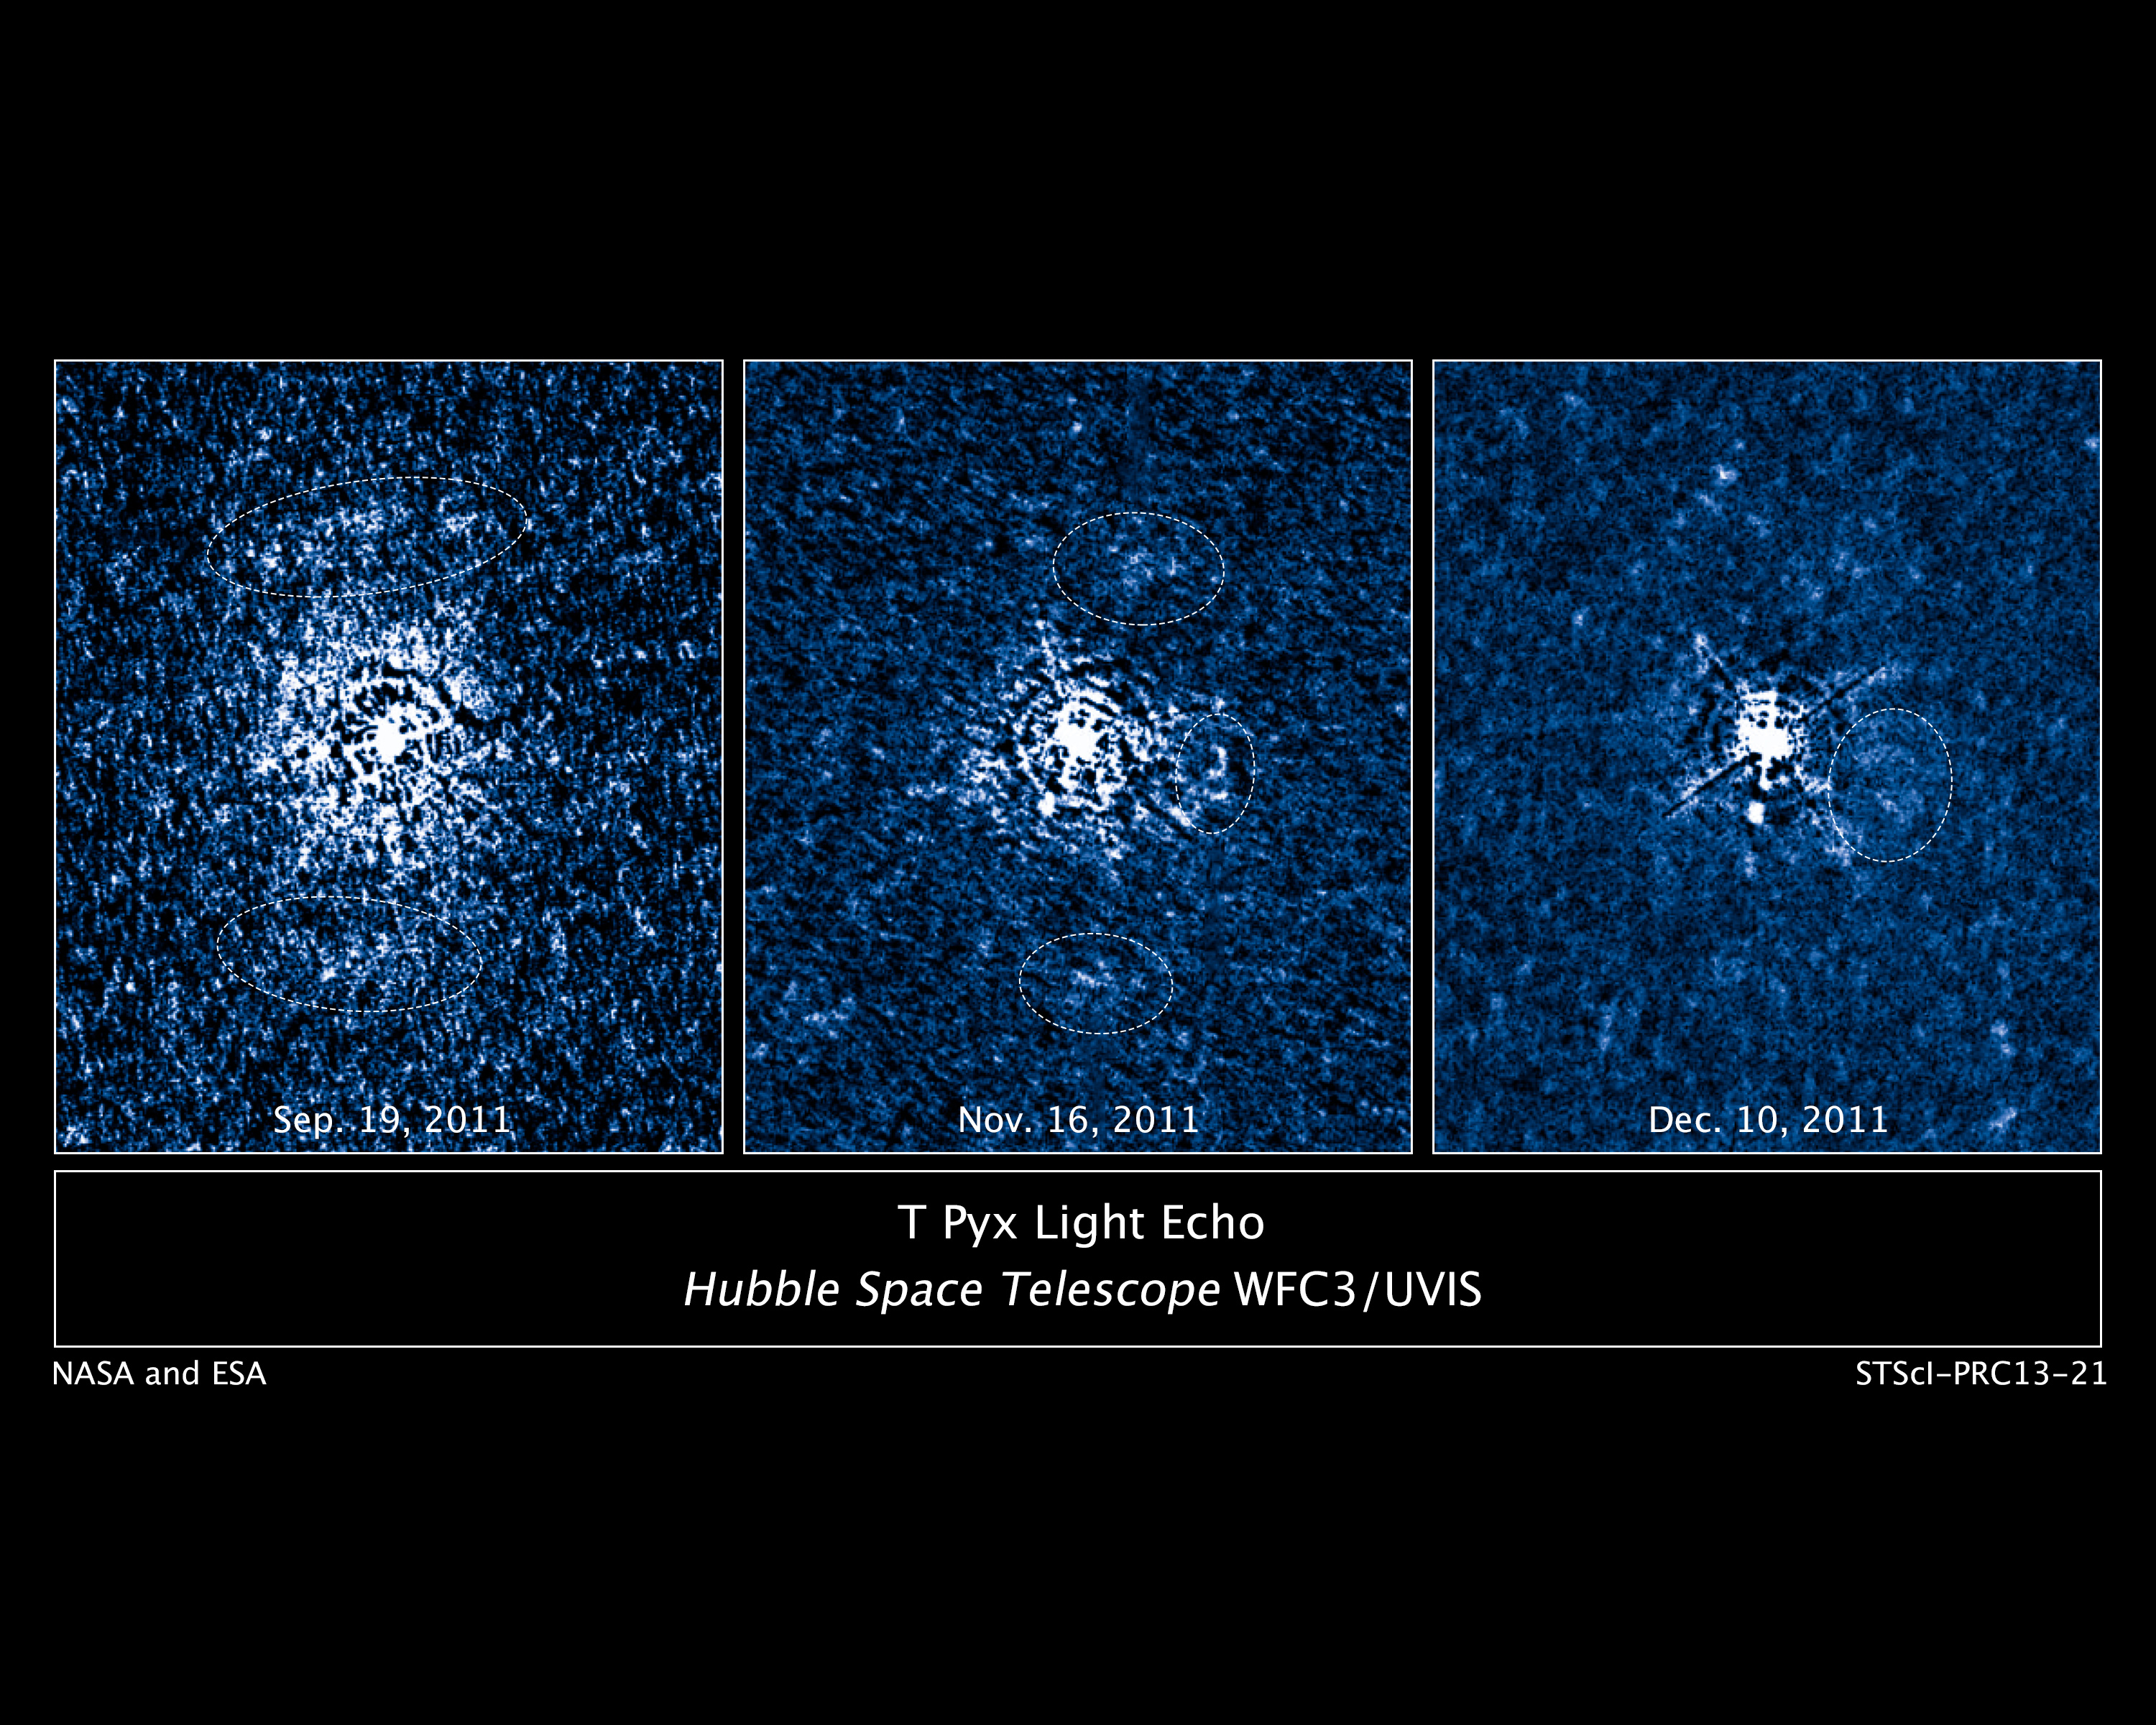

Flash of light from erupting star T Pyxidis illuminates debris disc

These three images taken by the NASA/ESA Hubble Space Telescope reveal a disc of previously-ejected material around an erupting star. This disc is being illuminated by a torrent of light unleashed during a stellar outburst.

Hubble's Wide Field Camera 3 imaged the double-star system T Pyxidis, or T Pyx, over a four-month period. T Pyx is a recurrent nova, erupting every 12 to 50 years. T Pyx's latest outburst was in April 2011. The star is the white blob in the middle of each image.

Astronomers used Hubble to trace the path of the light emitted from the outburst as it lit up the disc and material from previous ejecta. The white ovals in each image highlight the areas being illuminated by the light. The disc is so vast, about a light-year across, that the nova's light cannot brighten all of the material at once. Instead, the light sweeps across the material, sequentially illuminating parts of the disk, a phenomenon called a light echo. The light reveals which parts of the disc are nearer to Earth and which ones are farther away. By tracing the light, the team assembled a 3-D map of the structure around the nova.

A nova erupts when a white dwarf, the burned-out core of a Sun-like star, has siphoned enough hydrogen off a companion star to trigger a thermonuclear runaway. As hydrogen builds up on the surface of the white dwarf, it becomes hotter and denser until it detonates like a colossal hydrogen bomb, leading to a 10,000-fold increase in brightness in little more than a day.

T Pyx is located over 15,000 light-years away in the southern constellation of Pyxis (The Mariner's Compass). The images were taken on the 16th September, 16th November, and 10th December 2011.

Credit: NASA, ESA, A. Crotts, J. Sokoloski, and H. Uthas (Columbia University), and S. Lawrence (Hofstra University)